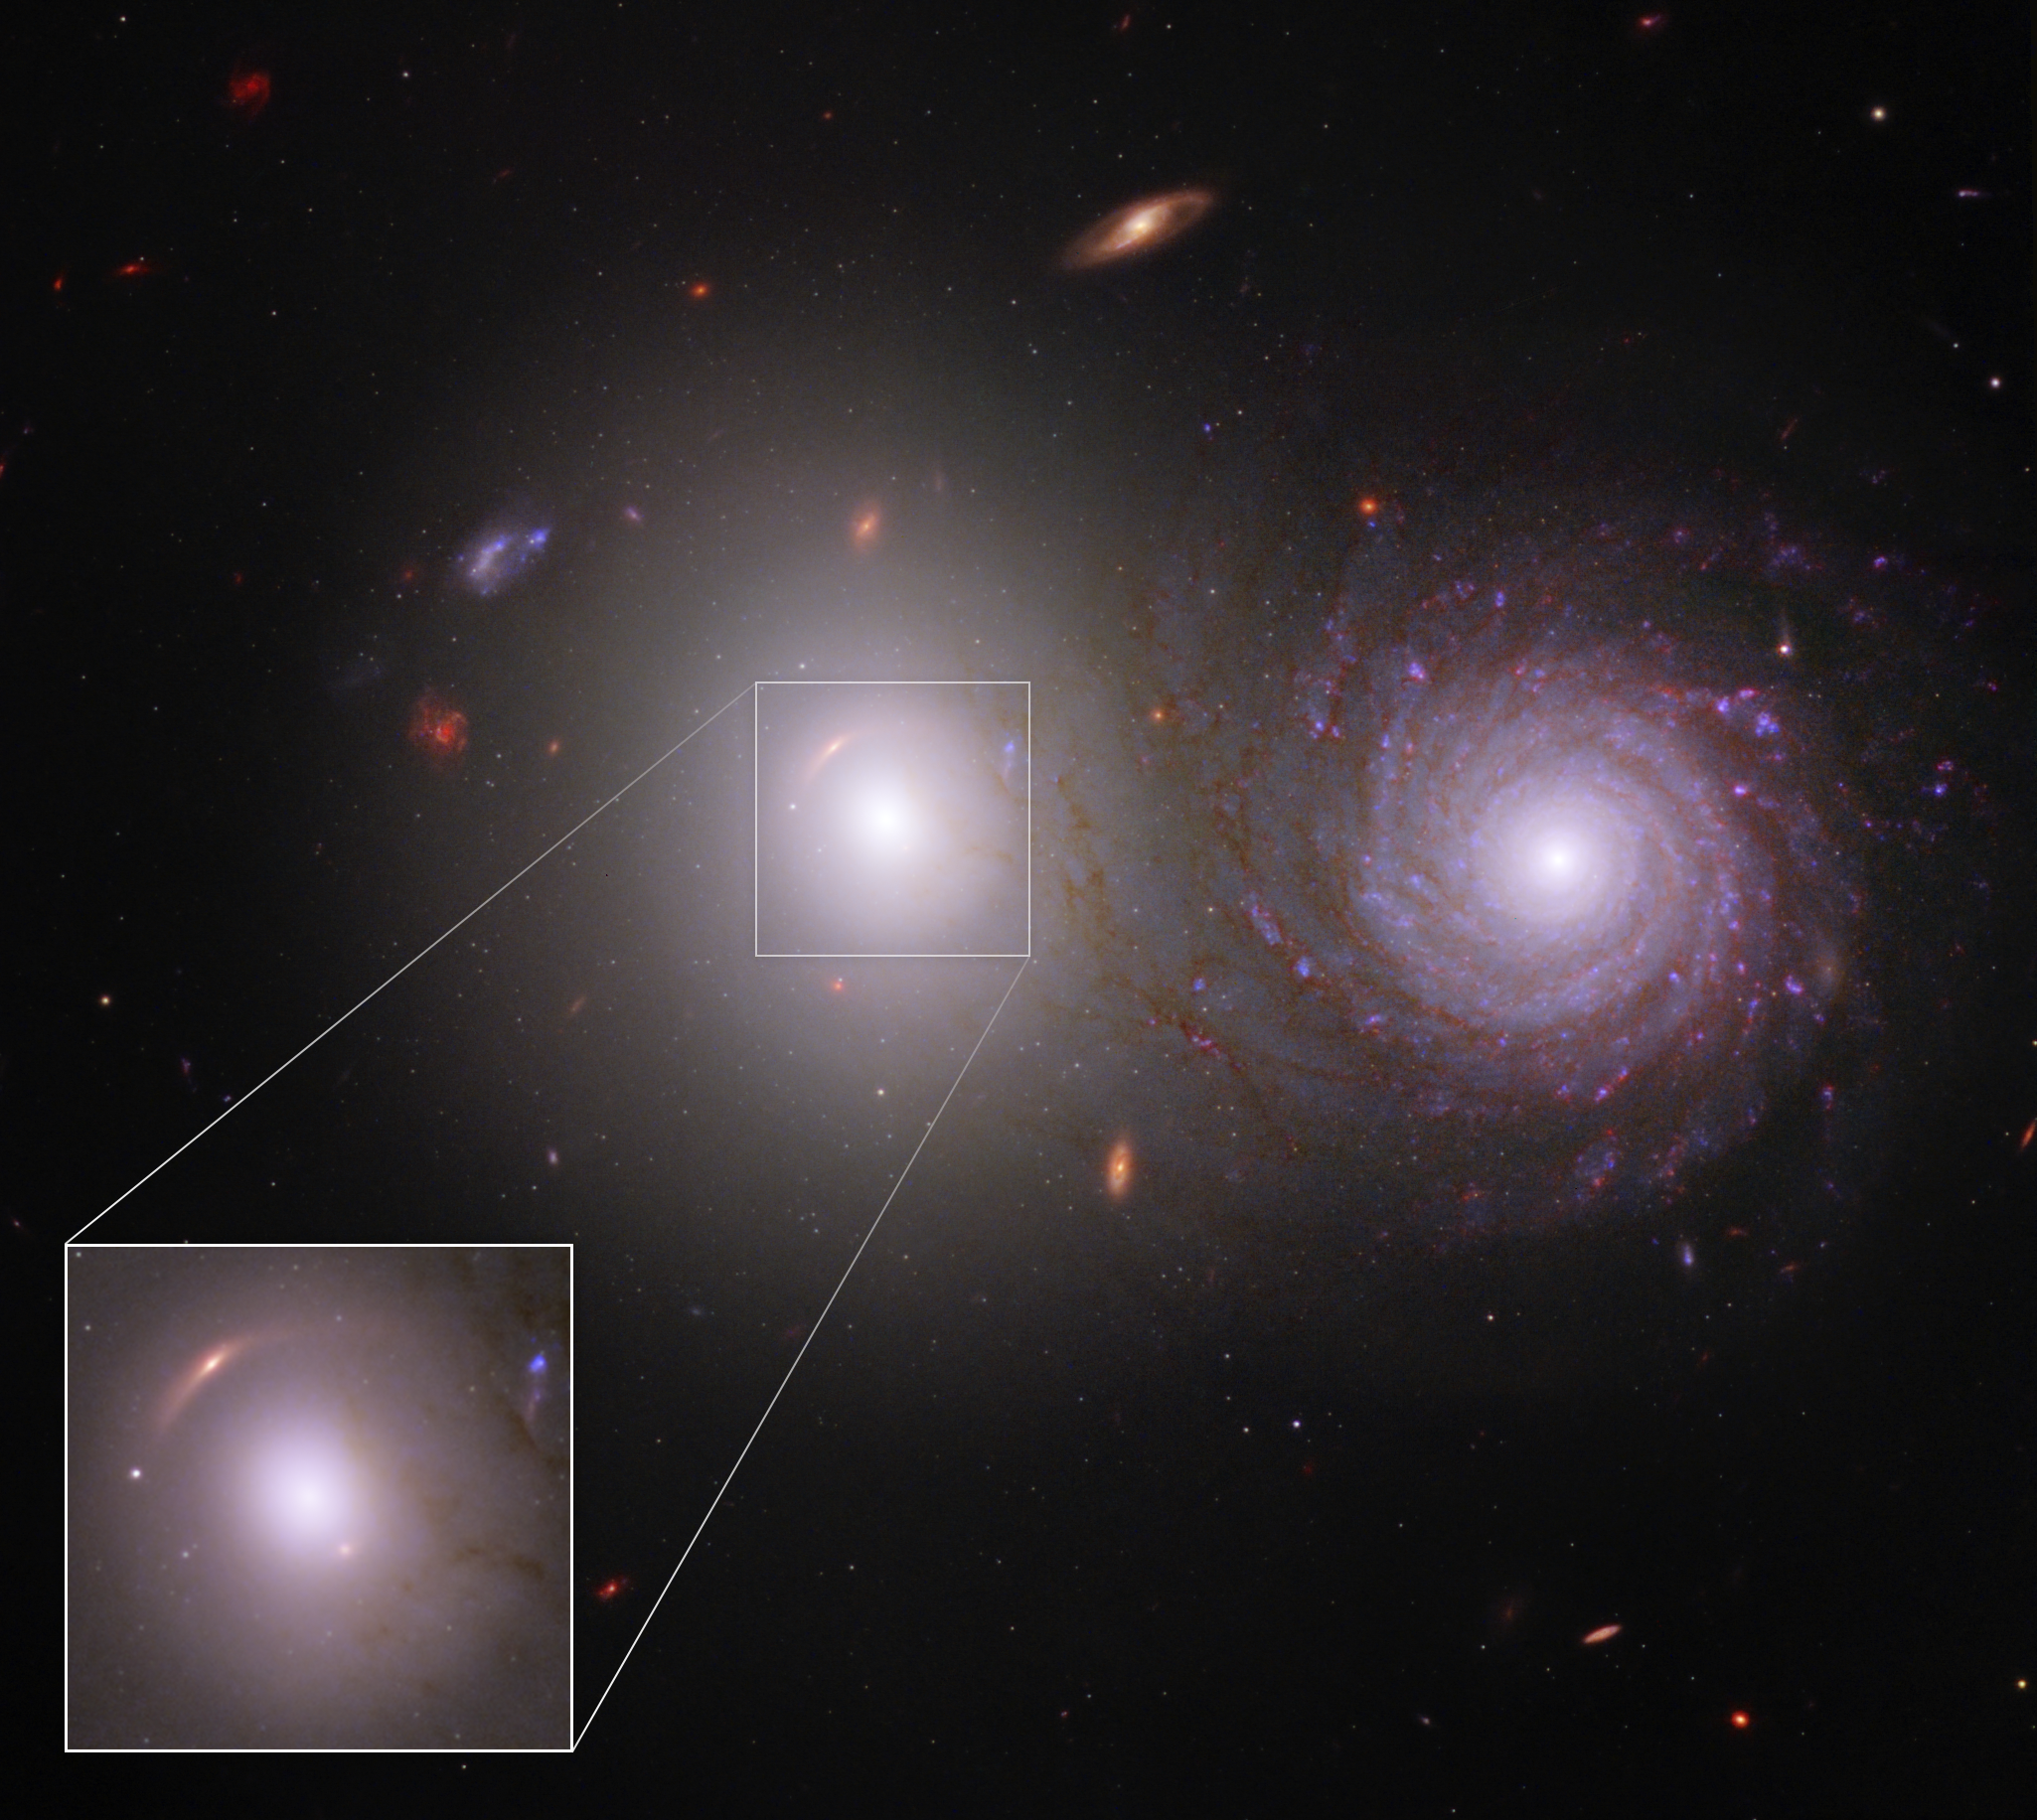

Lensed Galaxies in VV 191 (Webb and Hubble Composite Image)

Researchers identified a previously unknown lensed galaxy for the first time in new near-infrared data from the NASA/ESA/CSA James Webb Space Telescope.

Examine the white elliptical galaxy at left. A faint red arc appears in the inset at 10 o’clock. This is a very distant galaxy whose appearance is warped in Webb’s image. Its light is bent by the gravity of the elliptical foreground galaxy. Plus, its appearance is duplicated. The stretched red arc reappears – as a dot – at 4 o’clock.

These images of the lensed galaxy are so faint and so red that they went unrecognized in Hubble data, but are unmistakable in Webb’s near-infrared image. Simulations of gravitationally lensed galaxies like this help researchers reconstruct how much mass is in individual stars, along with how much dark matter is in the core of this galaxy.

This image includes ultraviolet and visible data from the NASA/ESA Hubble Space Telescope.

Note: This image highlights Webb’s science in progress, which has not yet been through the peer-review process.

Credit: NASA, ESA, CSA, Rogier Windhorst (ASU), William Keel (University of Alabama), Stuart Wyithe (University of Melbourne), JWST PEARLS Team, Alyssa Pagan (STScI)